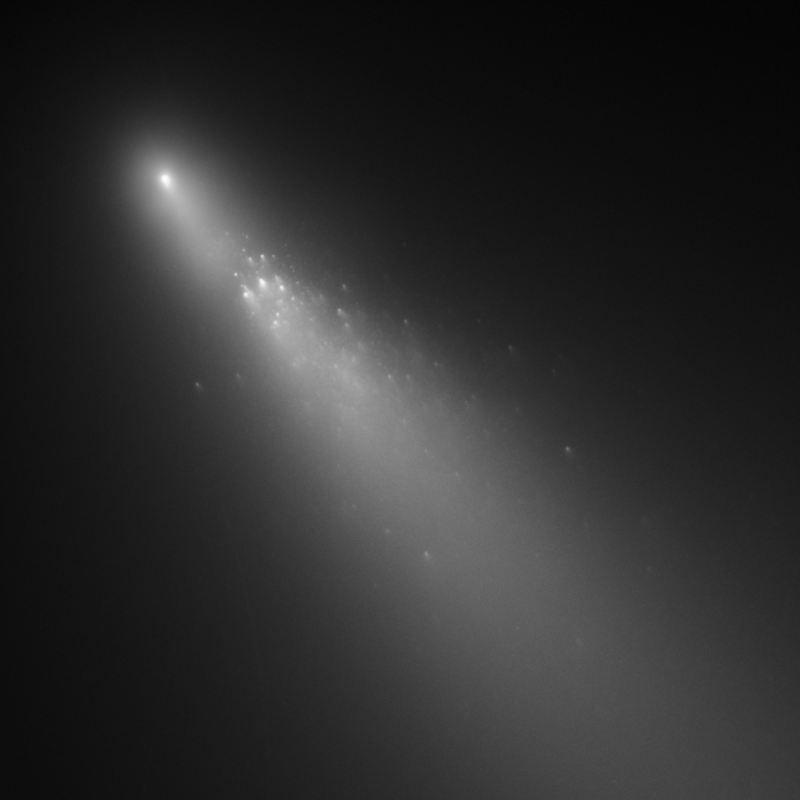

Comet 73P/Schwassmann-Wachmann 3 - Fragment B [20 April 2006]S

The last image from a three-day observation with Hubble showing the breakup of Comet 73P/Schwassmann-Wachmann 3's Fragment B.

Credit: NASA, ESA, H. Weaver (APL/JHU), M. Mutchler and Z. Levay (STScI)